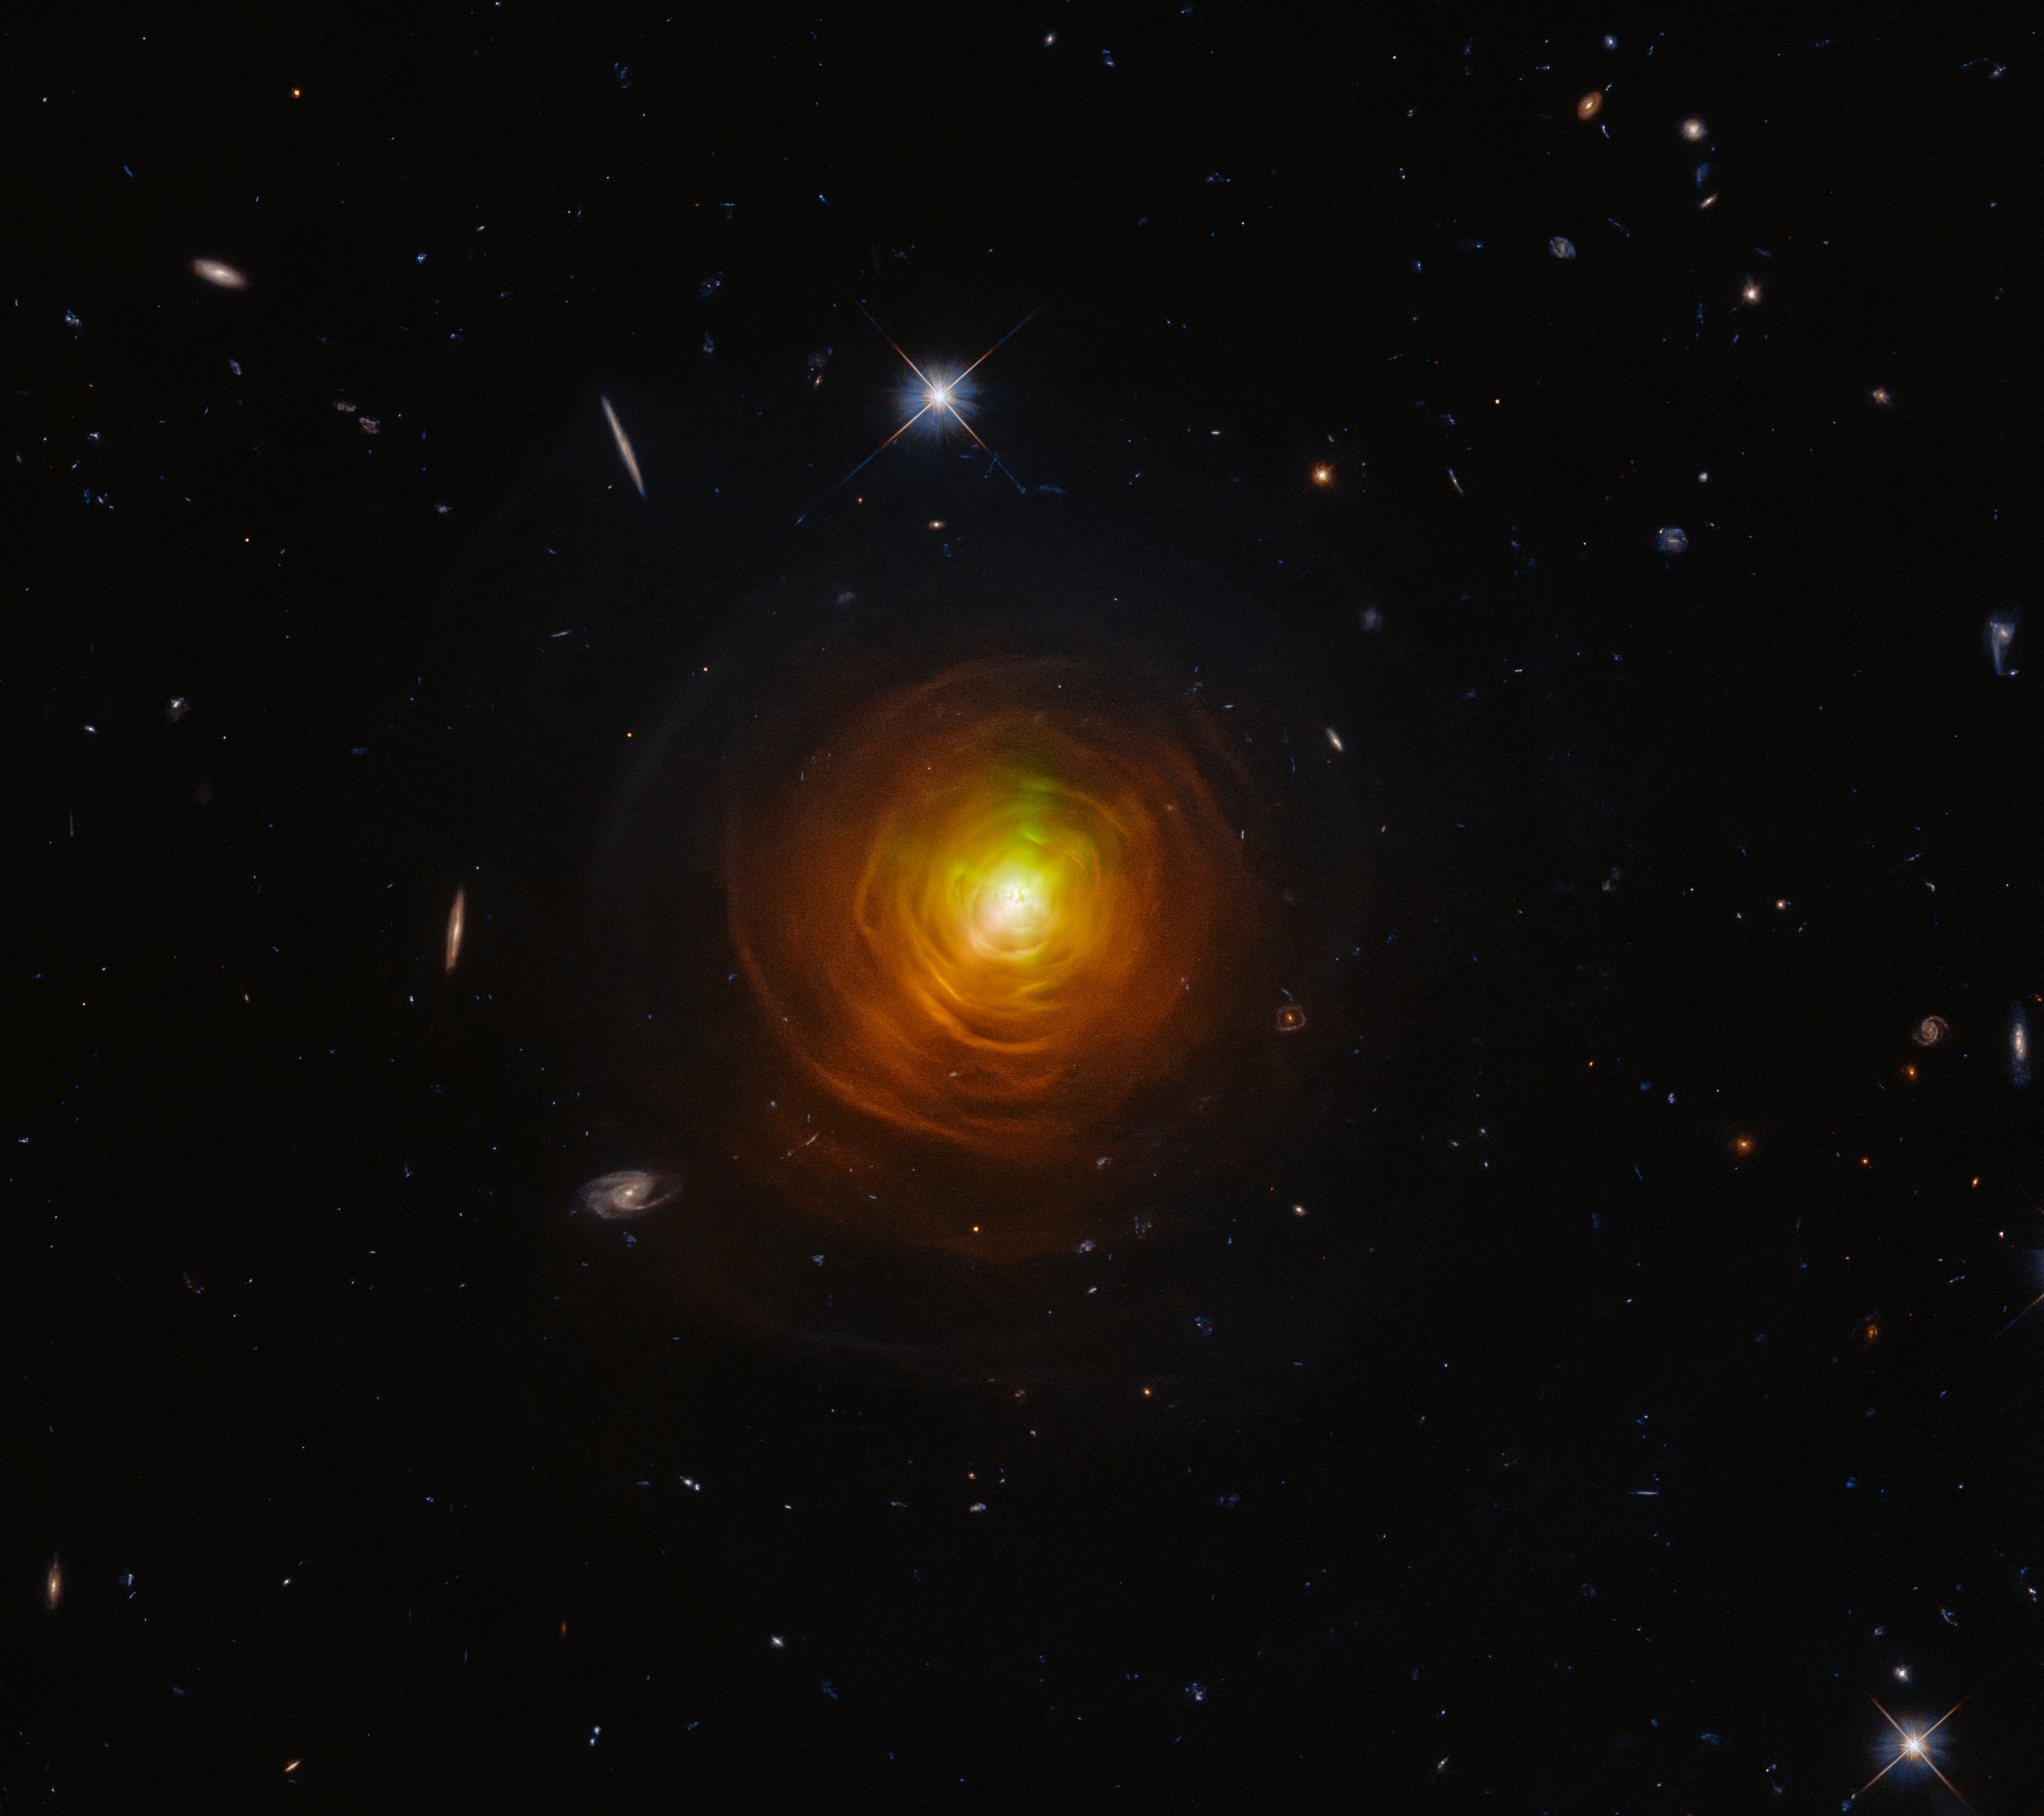

CW Leonis

The NASA/ESA Hubble Space Telescope celebrates Halloween this year with a striking observation of the carbon star CW Leonis, which resembles a baleful orange eye glaring from behind a shroud of smoke.

CW Leonis glowers from deep within a thick shroud of dust in this image from the NASA/ESA Hubble Space Telescope. Lying roughly 400 light-years from Earth in the constellation Leo, CW Leonis is a carbon star — a luminous type of red giant star with a carbon-rich atmosphere. The dense clouds of sooty gas and dust engulfing this dying star were created as the outer layers of CW Leonis itself were thrown out into the void.

Credit: ESA/Hubble & NASA, T. Ueta, H. Kim